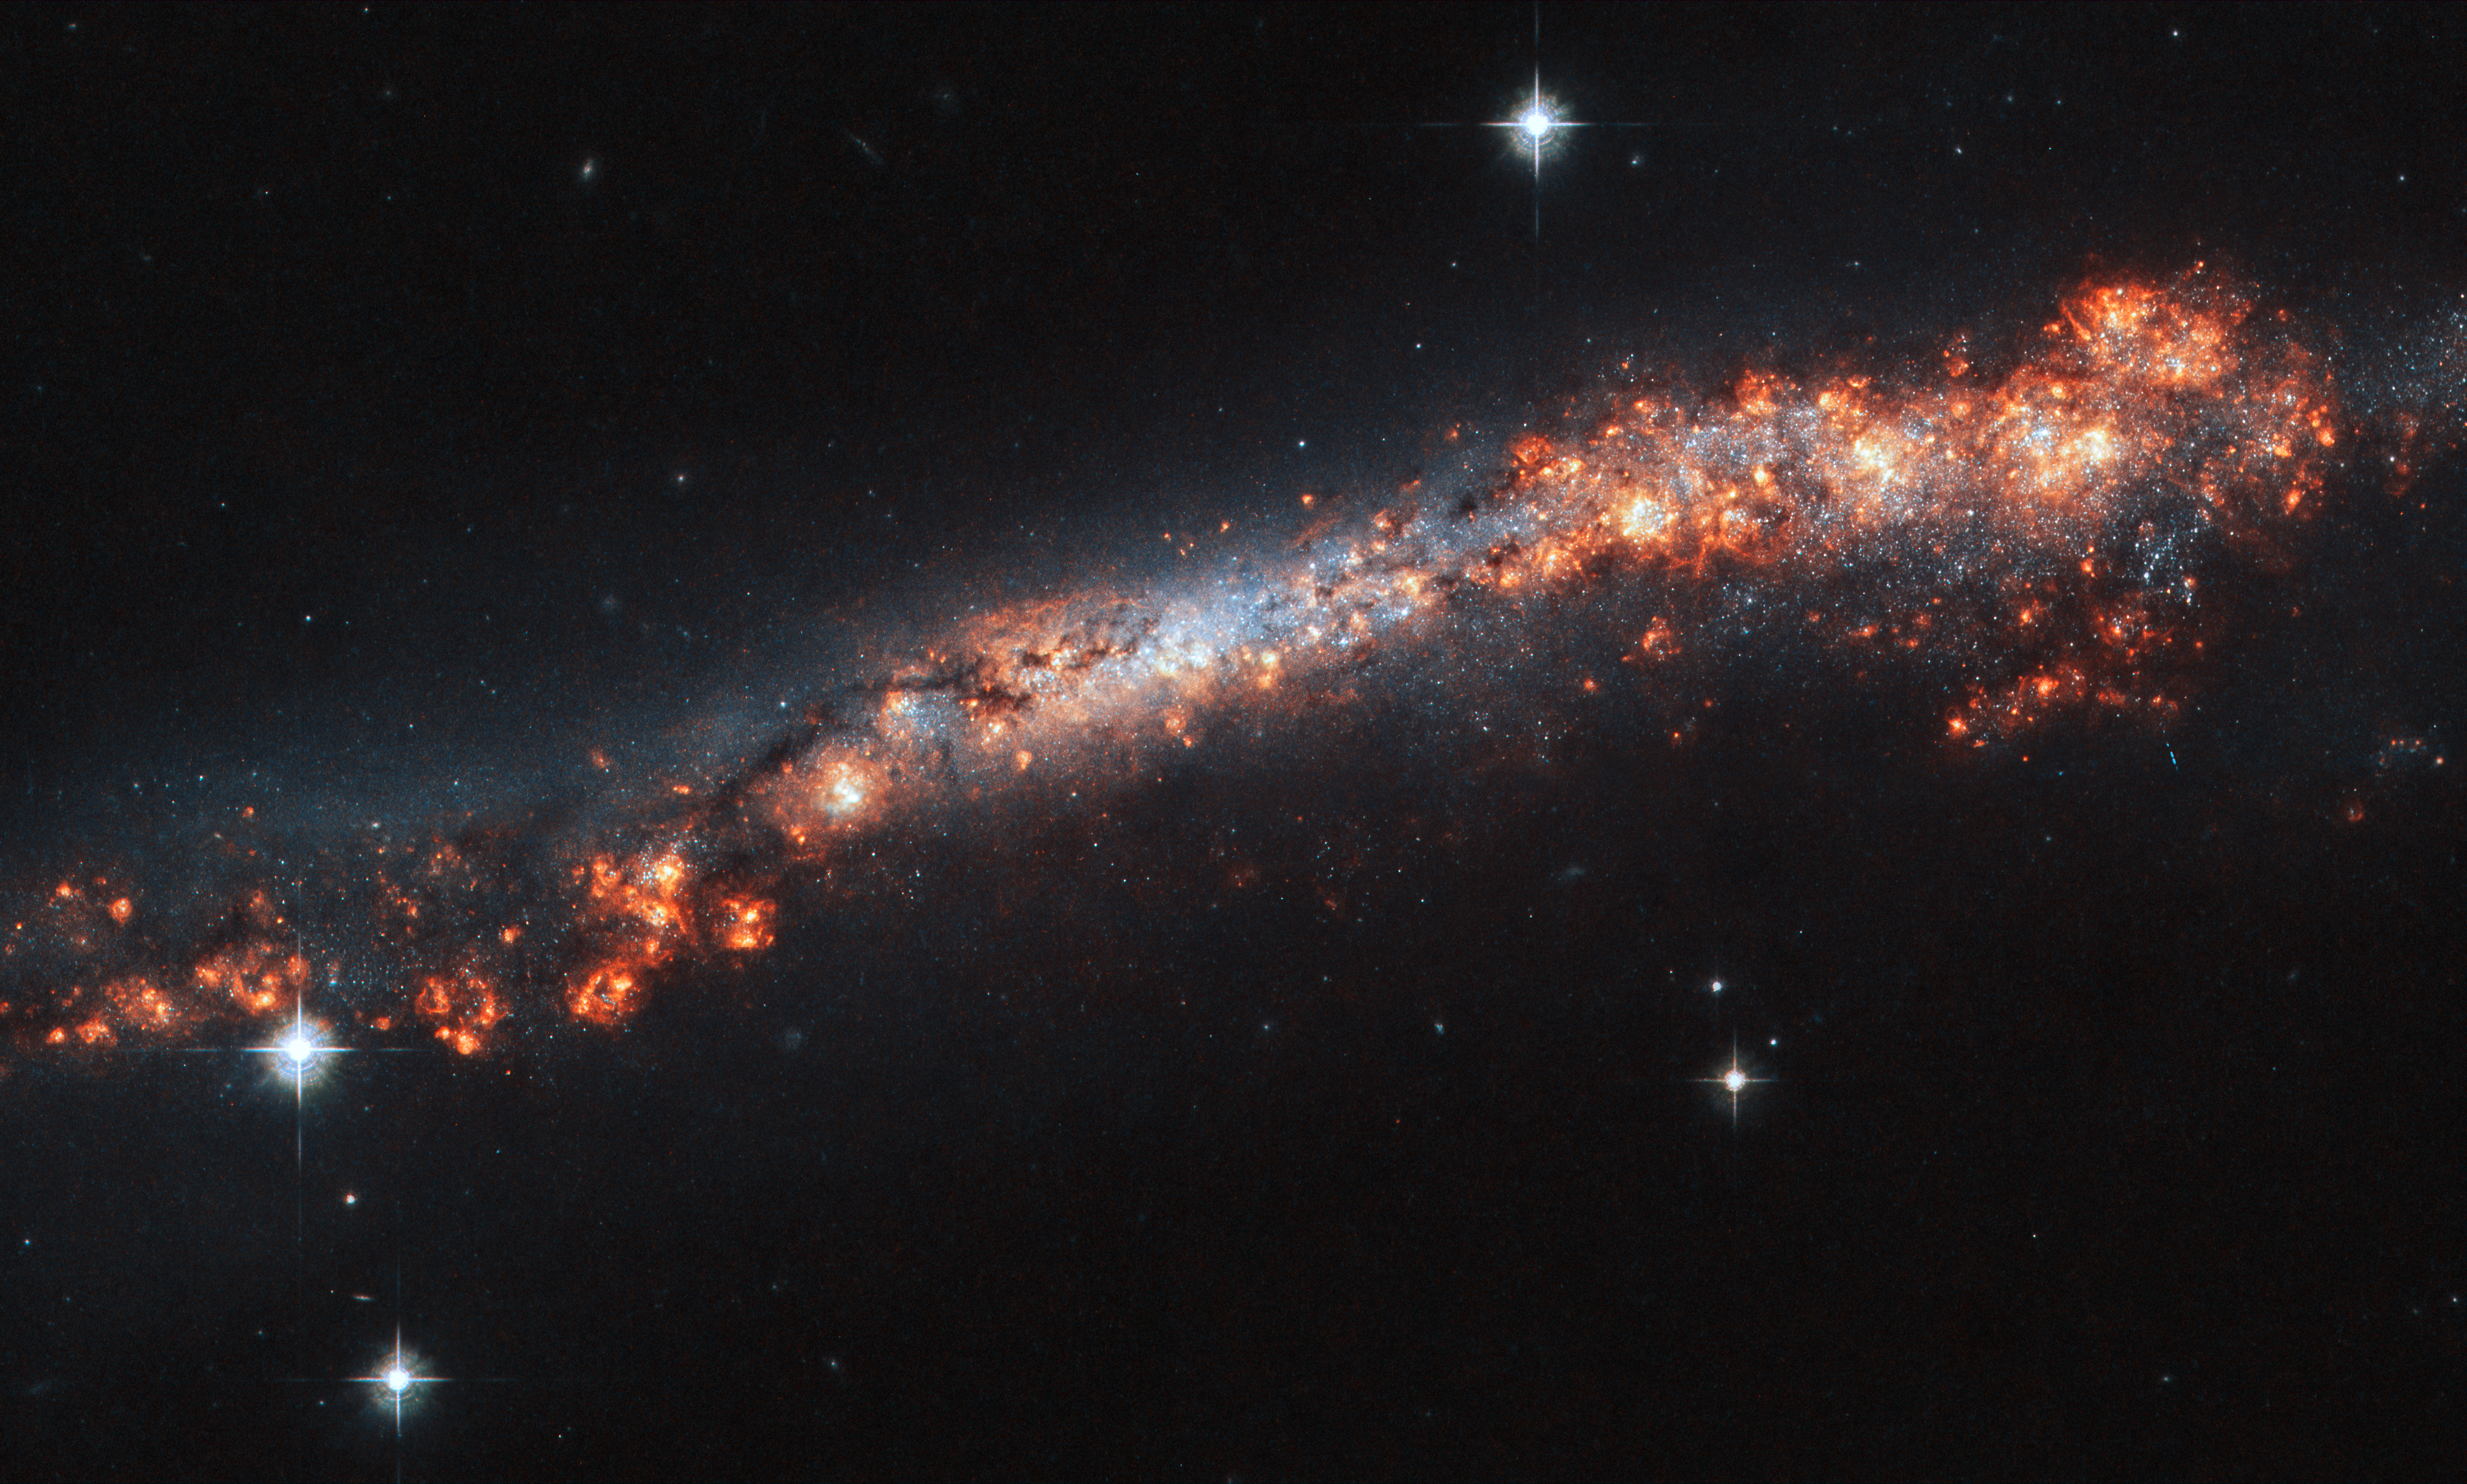

Feeling Edgy

Believe it or not, this long, luminous streak, speckled with bright blisters and pockets of material, is a spiral galaxy like our Milky Way. But how could that be?

It turns out that we see this galaxy, named NGC 3432, orientated directly edge-on to us from our vantage point here on Earth. The galaxy’s spiral arms and bright core are hidden, and we instead see the thin strip of its very outer reaches. Dark bands of cosmic dust, patches of varying brightness, and pink regions of star formation help with making out the true shape of NGC 3432 — but it’s still somewhat of a challenge! Because observatories such as the NASA/ESA Hubble Space Telescope have seen spiral galaxies at every kind of orientation, astronomers can tell when we happen to have caught one from the side.

The galaxy is located in the constellation of Leo Minor (The Lesser Lion). Other telescopes that have had NGC 3432 in their sights include those of the Sloan Digital Sky Survey, the Galaxy Evolution Explorer (GALEX), and the Infrared Astronomical Satellite (IRAS).

Credit: ESA/Hubble & NASA, A. Filippenko, R. Jansen